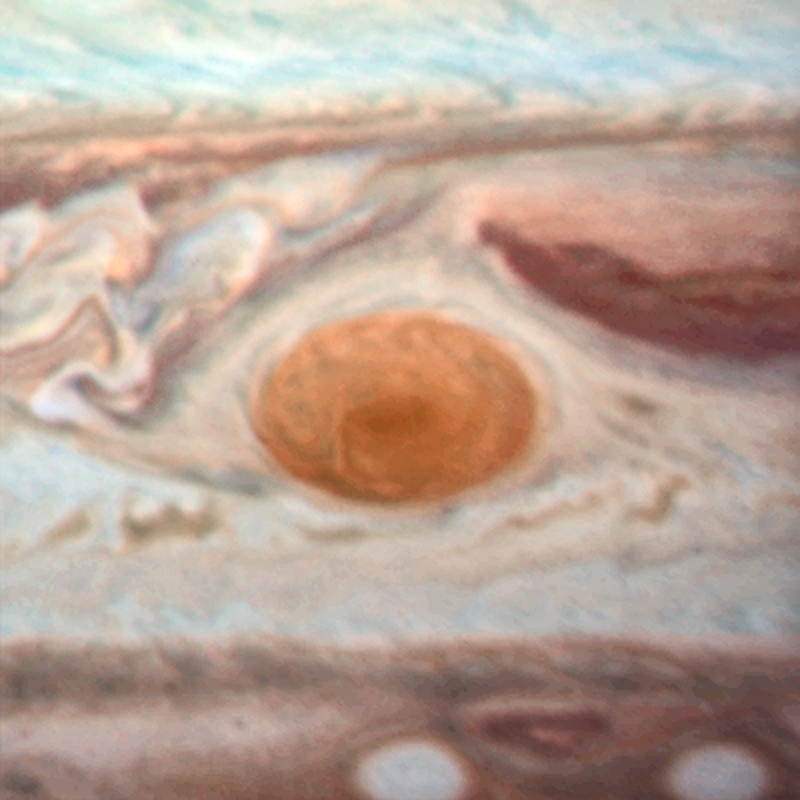

Jupiter's Great Red Spot in 2014

An image of Jupiter's Great Red Spot taken in 2014 with Hubble's WFC3 camera. The spot has a diameter here of 16 000km.

Credit: NASA, ESA and A. Simon (Goddard Space Flight Center)